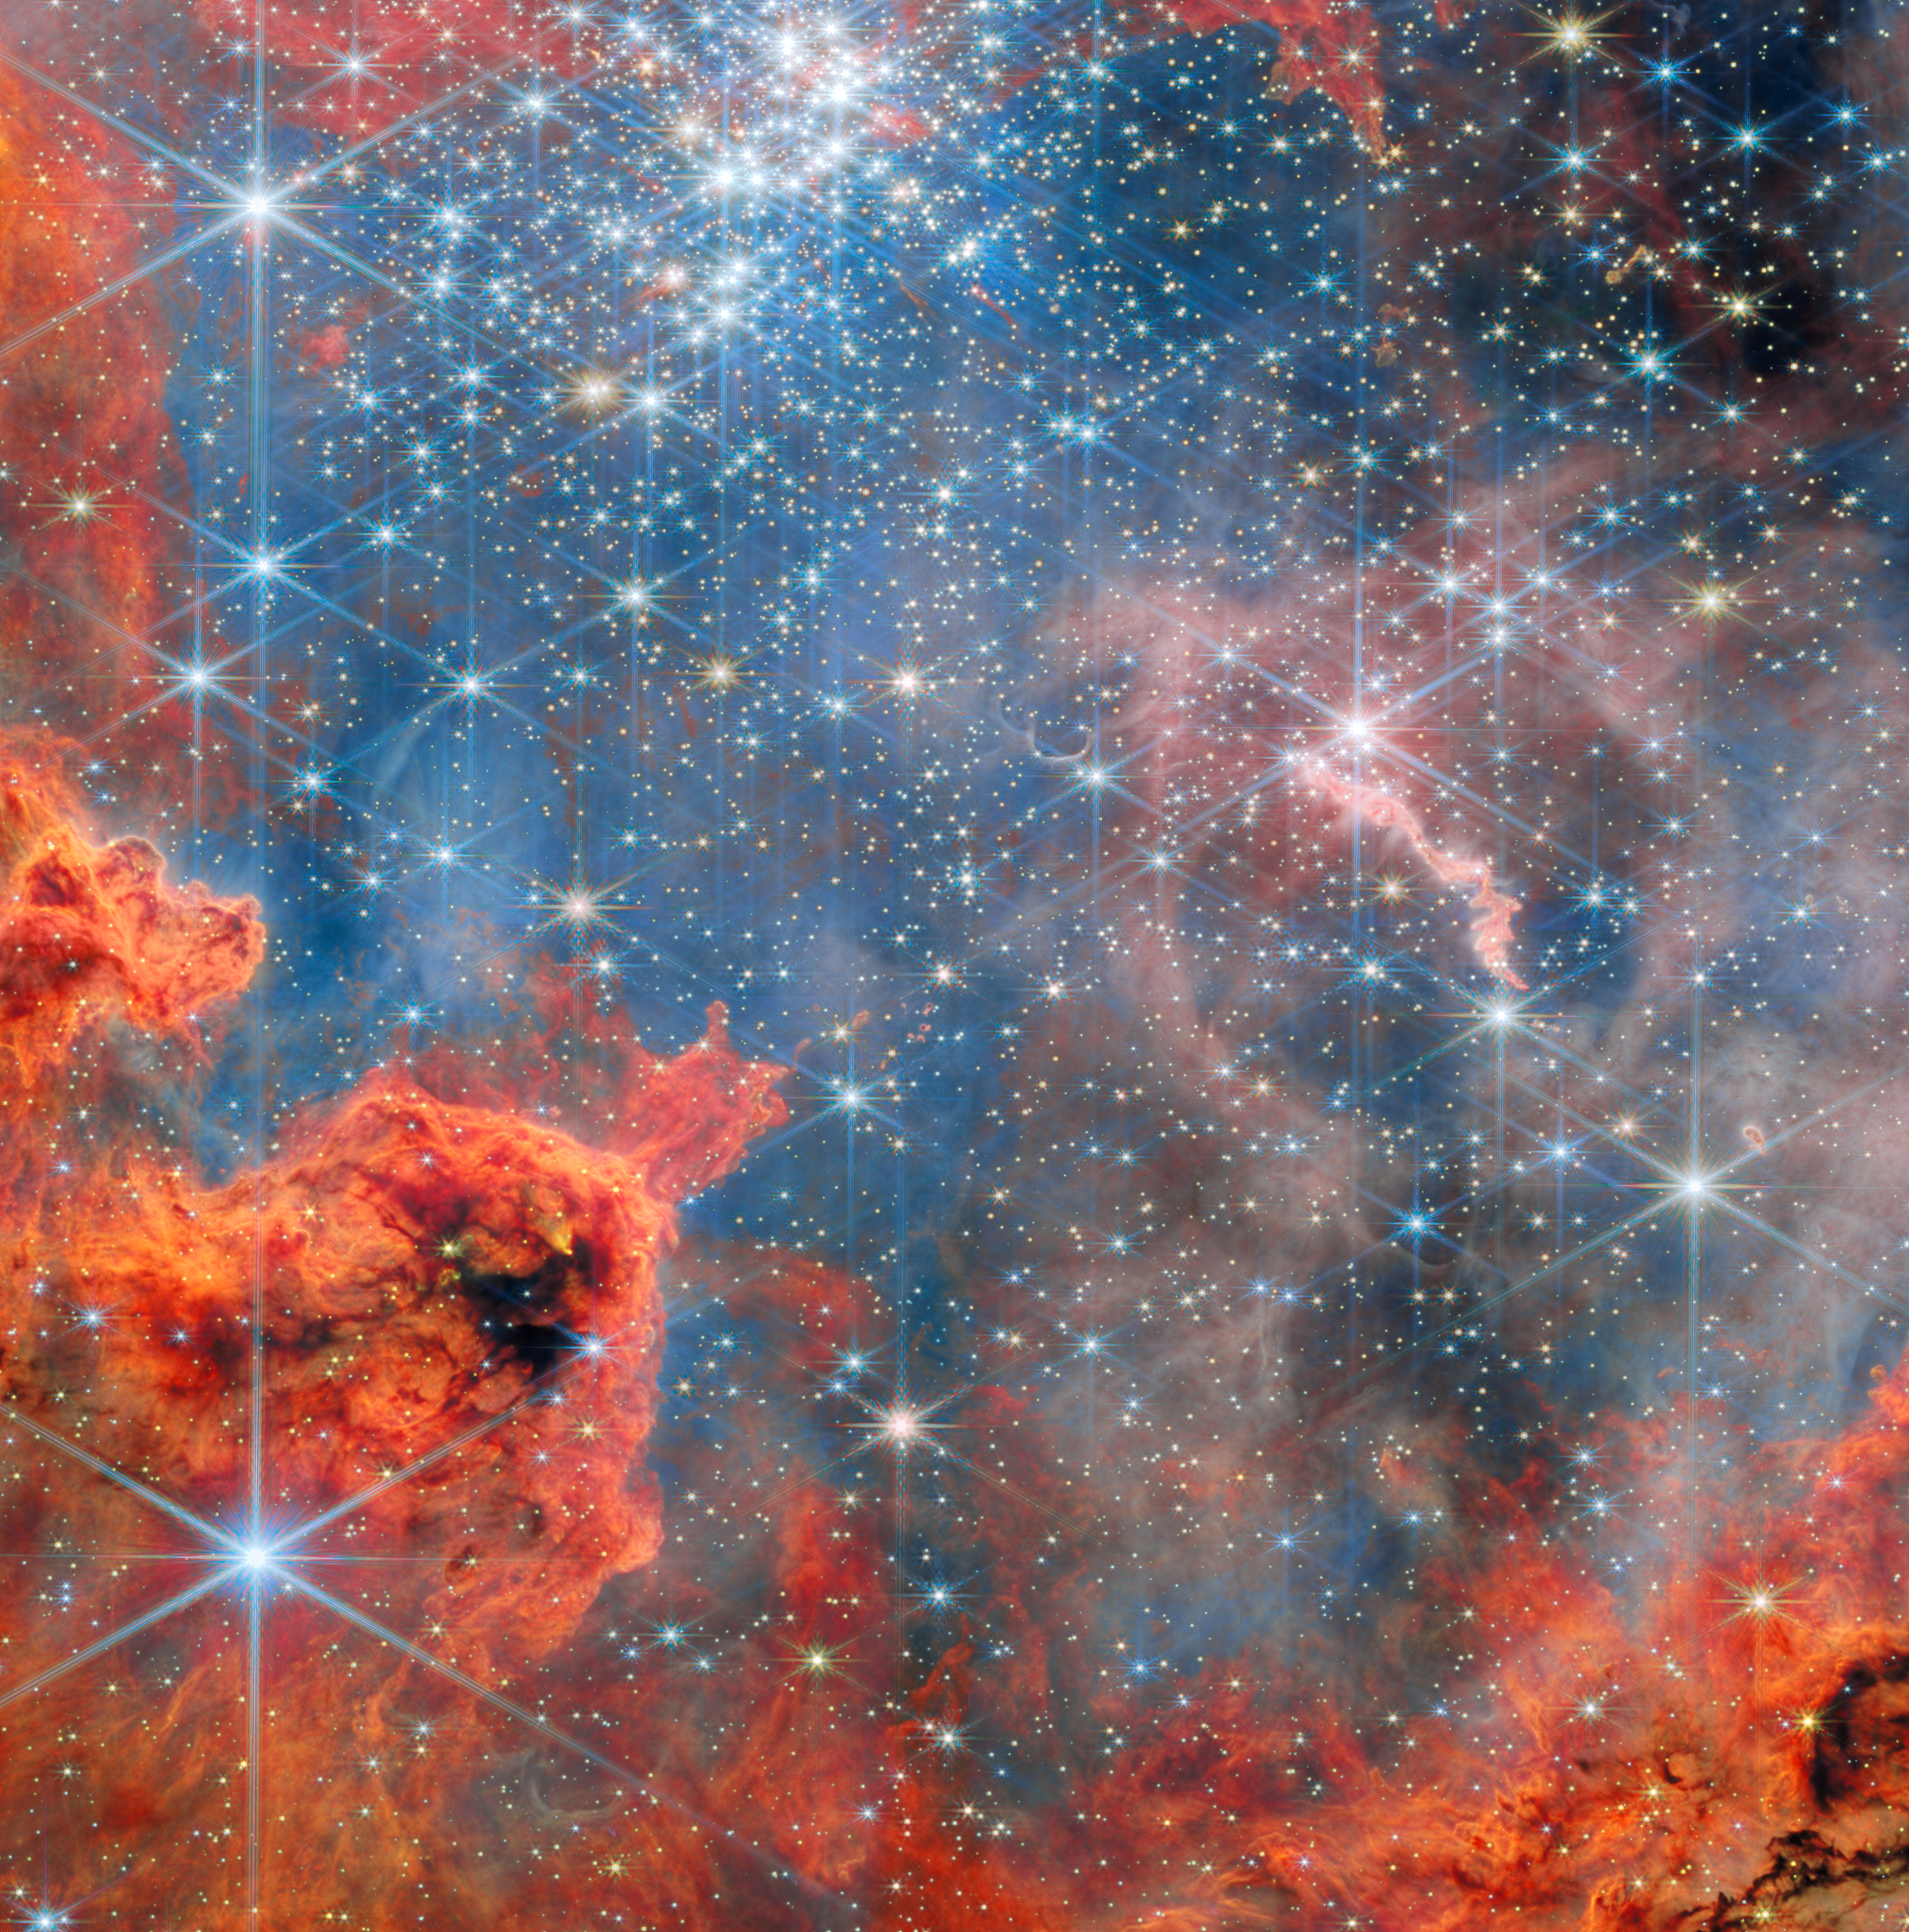

Dwarf stars in a glittering sky

The final ESA/Webb Picture of the Month feature for 2025 showcases a festive-looking region filled with glowing clouds of gas and thousands of sparkling stars. This star cluster, known as Westerlund 2, resides in a stellar breeding ground known as Gum 29, located 20,000 light-years away from Earth in the constellation Carina (the Keel).

This image of Westerlund 2 uses data from Webb’s Near-InfraRed Camera (NIRCam) and Mid-InfraRed Instrument (MIRI). The cluster measures between 6 light-years and 13 light-years across, and is host to some of our Milky Way galaxy's hottest, brightest, and most massive stars. It was also the feature of Hubble’s 25th anniversary image in 2015.

This new Webb image captures the bright, brilliant cluster near the top that is packed with young, massive stars whose intense light shapes the entire scene. Below and around them, swirls of orange and red gas form sculpted walls and tangled clouds - material that is being pushed, eroded, and illuminated by the cluster’s powerful radiation. Threaded throughout the view are countless tiny stars just beginning to shine, some still surrounded by the gas and dust from which they formed. The soft blues and pinks are wisps of thinner material drifting between the denser clouds. Scattered across the field are also many bright stars much closer to us, whose sharp, star-shaped patterns are created by Webb’s optics. The result is a vivid portrait of a stellar nursery in action, where intense energy from newborn stars carves dramatic shapes into the surrounding nebula and drives the ongoing cycle of star formation.

These new Webb observations of Westerlund 2 have revealed, for the first time, the full population of brown dwarfs in this extremely massive young star cluster, including objects as small as about 10 times the mass of Jupiter. This data is allowing astronomers to find several hundred stars with discs in various evolutionary states to facilitate our understanding of how discs evolve and how planets form in such massive young clusters. This image was developed using data from Webb’s programme #3523 (M. Guarcello) as part of the Extended Westerlund 1 and 2 Open Clusters Survey (EWOCS).

Credit: ESA/Webb, NASA & CSA, V. Almendros-Abad, M. Guarcello, K. Monsch, and the EWOCS team.